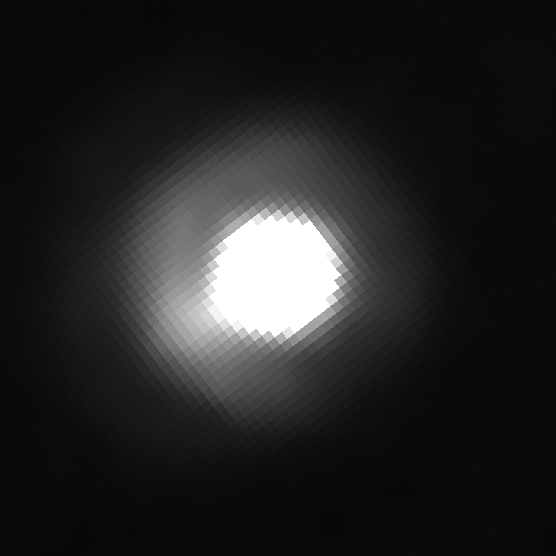

Brown dwarf 2M J044144 with companion

Brown dwarf 2M J044144 with companion. Image taken with Hubble's Wide Field Planetary Camera 2 on 20 August, 2008.

Credit: NASA, ESA, K. Todorov and K. Luhman (Penn State University)